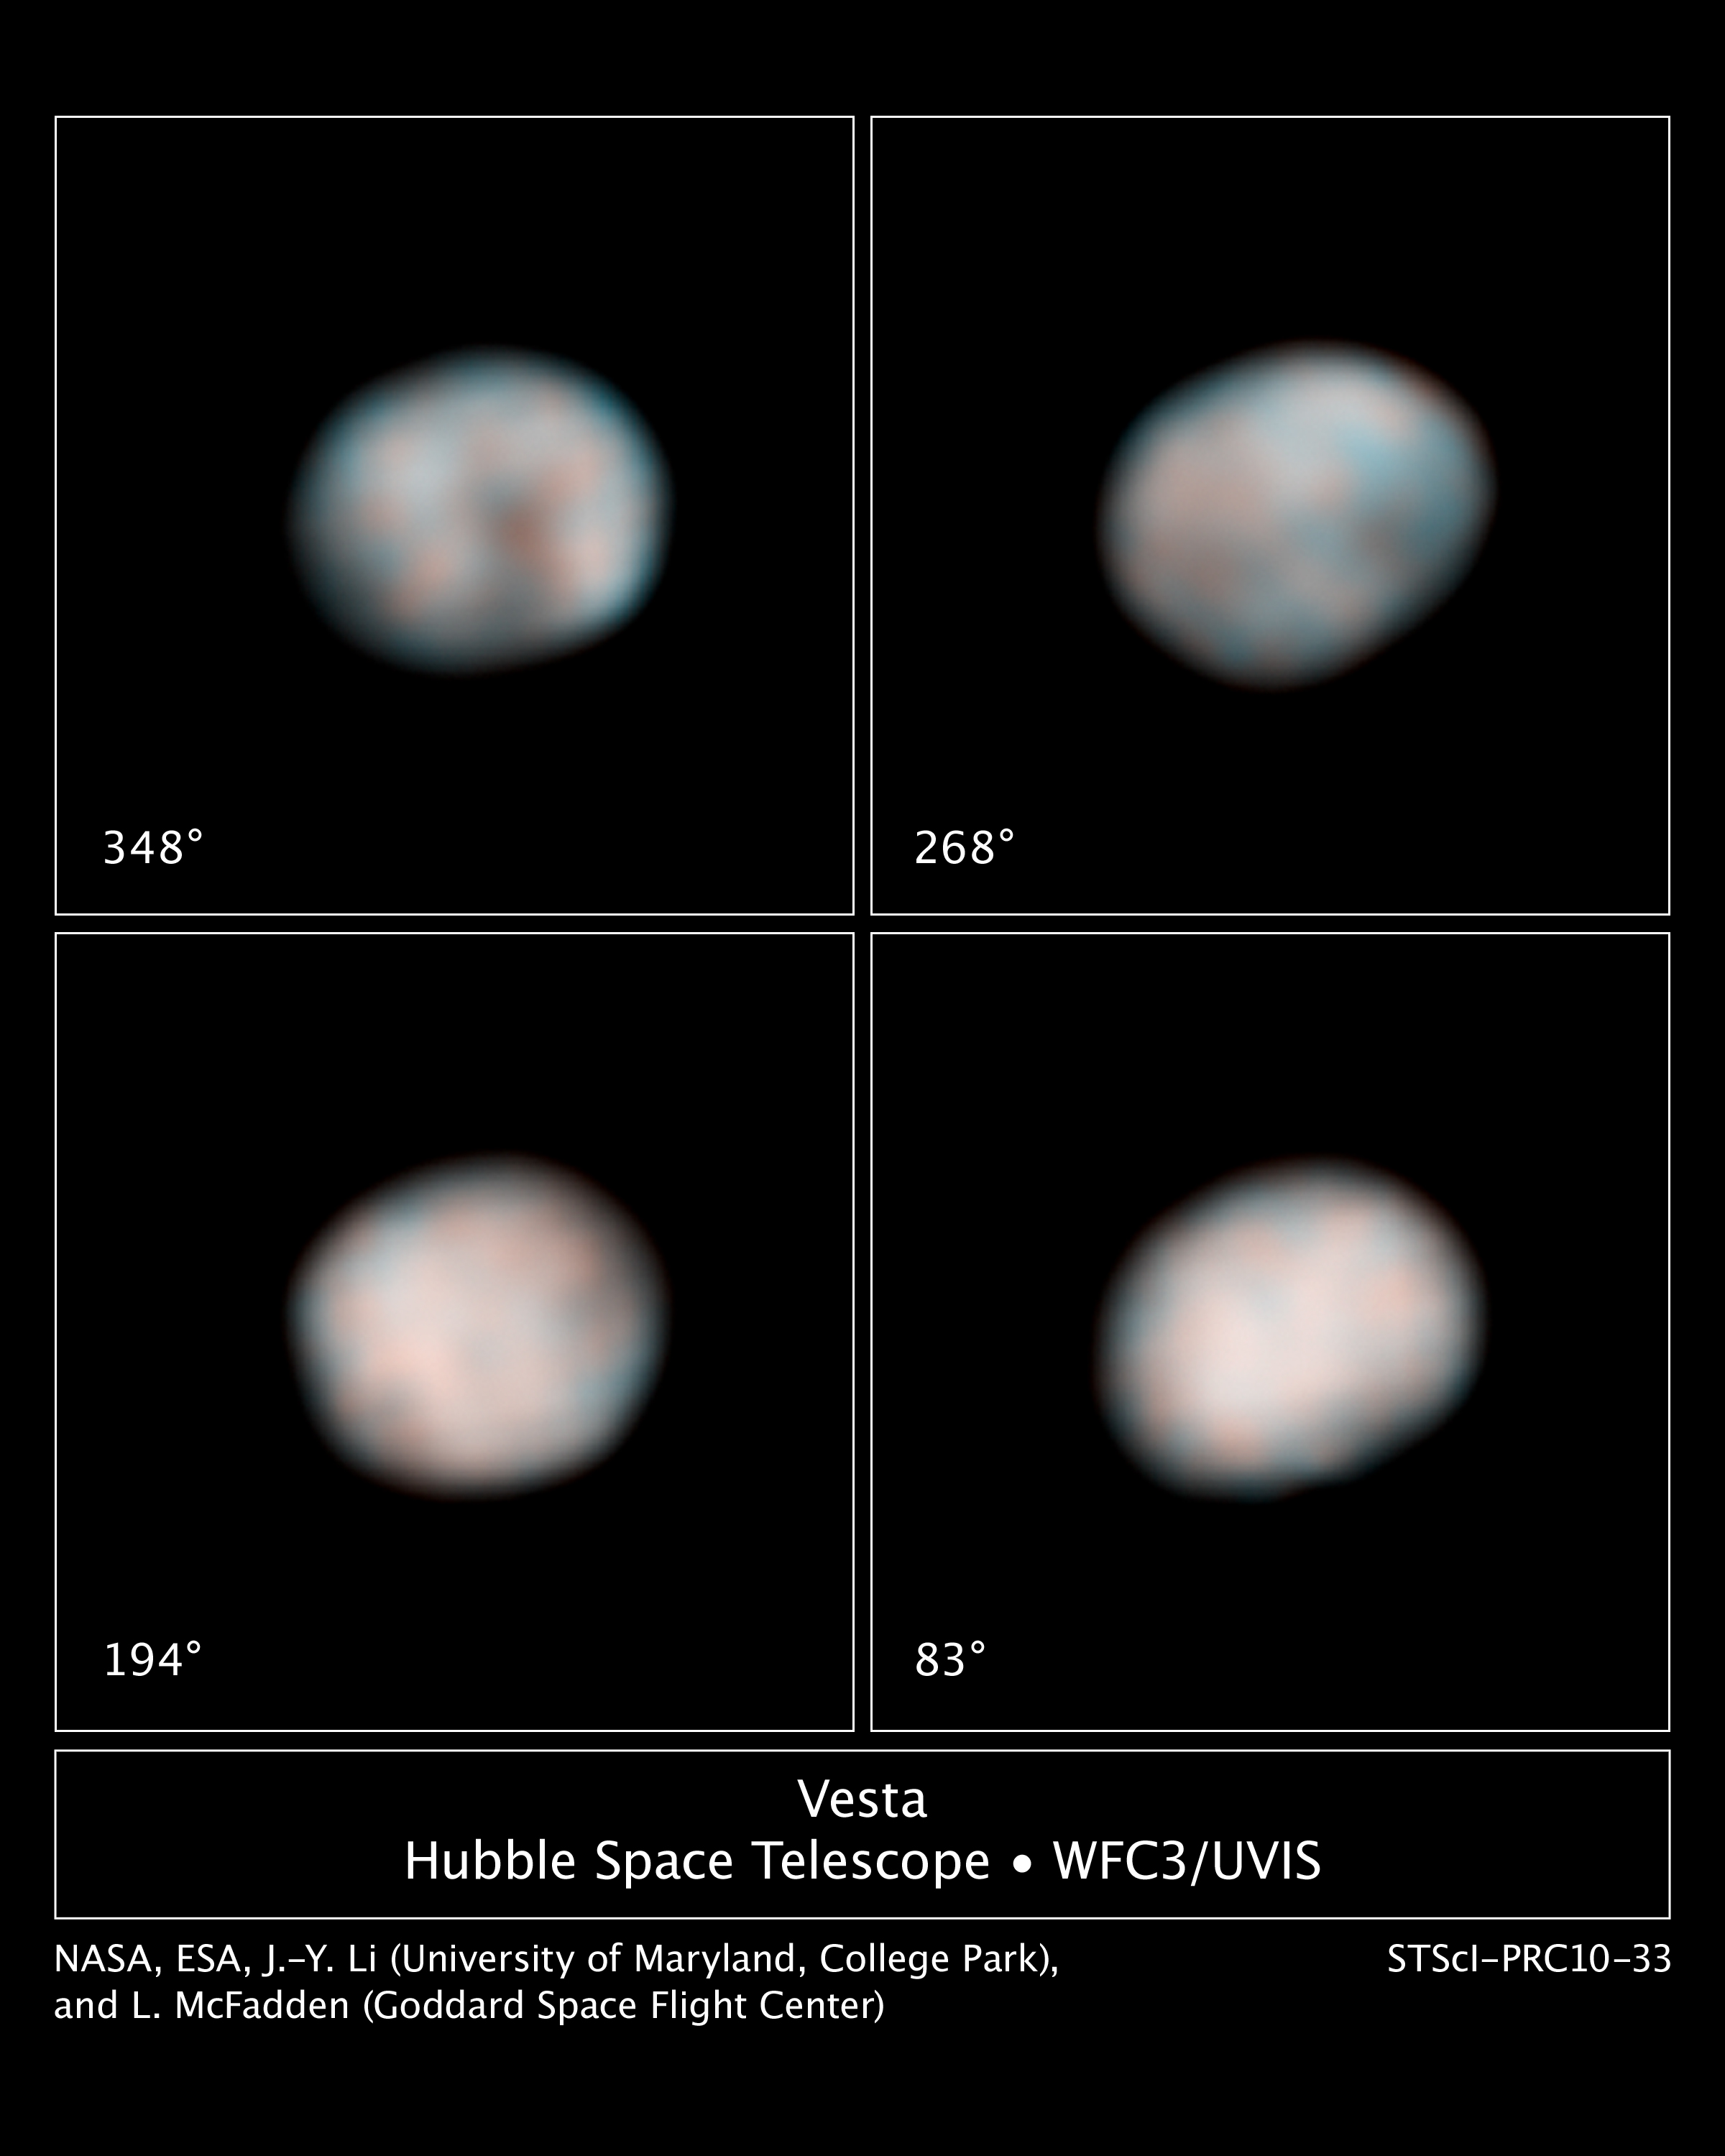

The faces of Vesta

The NASA/ESA Hubble Space Telescope snapped these images of the asteroid Vesta in preparation for the Dawn spacecraft's visit in 2011.

Each of the four Hubble images captures views of Vesta during its 5.34-hour rotation period. Hubble's sharp "eye" can see features as small as about 40 kilometers across in these images. Vesta was 211 kilometers from Earth when Hubble made the observations.

The images show the difference in brightness and colour on the asteroid's surface. These characteristics hint at the large-scale features that the Dawn spacecraft will see when it visits the potato-shaped asteroid.

Vesta is somewhat like our Moon, with ancient lava beds (the dark patches) and powdery debris, the pulverized remains of impacts (the orange-coloured areas). The flattened area on one end of Vesta, visible in the top row of images, is a giant impact crater formed by a collision billions of years ago. The crater is 460 kilometers across, which is close to Vesta's roughly 530-kilometer diameter. Vesta is about the size of Arizona.

Astronomers used the images, taken with Hubble's Wide Field Camera 3, to better determine the orientation of Vesta's spin axis.

This will help scientists refine the Dawn spacecraft's orbit around the asteroid. Dawn will orbit the rocky object for a year, beginning in July 2011. The spacecraft then will travel to the dwarf planet Ceres, arriving in 2015.

Vesta is one of the largest of a reservoir of about 100,000 asteroids, the leftover material from the formation of our solar system's planets 4.6 billion years ago.

Hubble has kept its "eye" on Vesta for more than 15 years, beginning in 1994. Hubble images of Vesta in 1997 helped astronomers discover the asteroid's immense impact crater. Astronomers combined views of Vesta in near-ultraviolet and blue light to construct these images. The images were taken on 28 Feb. 2010.

Credit: NASA, ESA, and J.-Y. Li (University of Maryland, College Park), and L. McFadden (NASA GSFC)